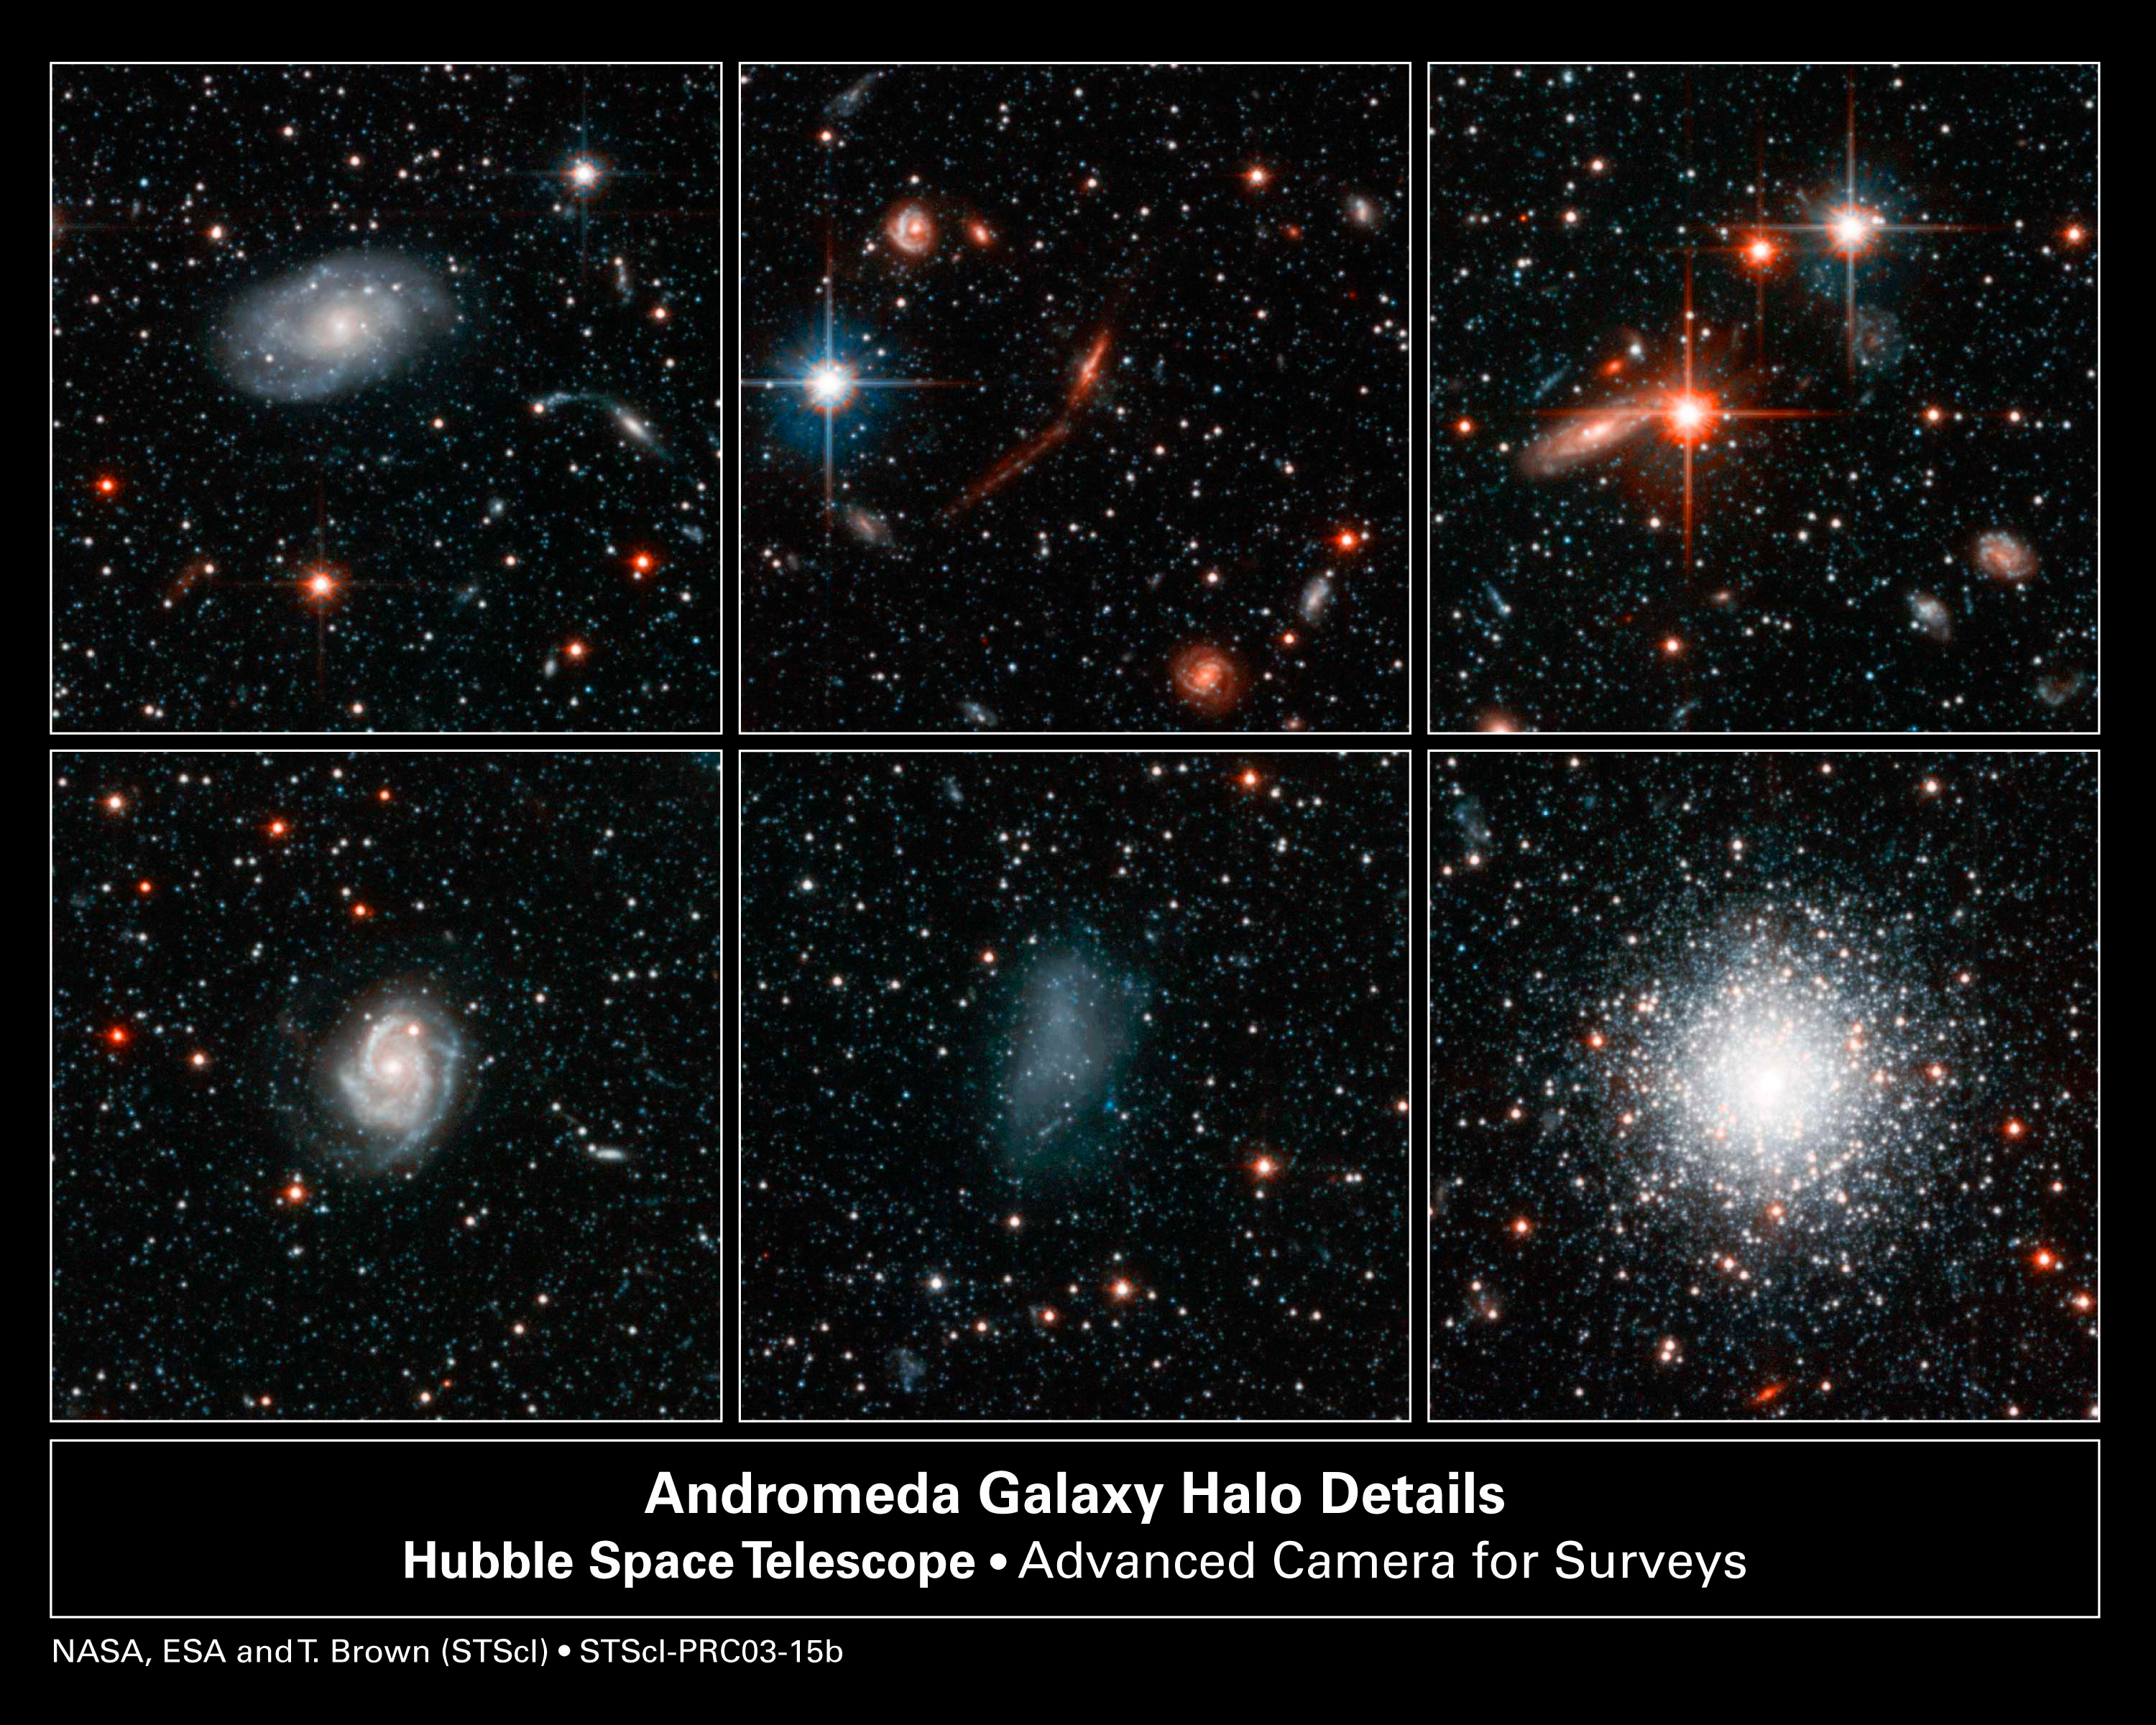

Postcards from Andromeda

Glittering stars. Distorted galaxies. A cluster of more than 100, 000 stars. The celestial objects in this six-panel photograph are just a sampling of the more than 300, 000 stars and the thousands of distant galaxies seen in the image of a small region of the Andromeda galaxy's halo, a spherical cloud of stars around the galaxy. The image was taken with the Advanced Camera for Surveys aboard the NASA/ESA Hubble Space Telescope.

Credit: NASA, ESA and T.M. Brown (STScI)